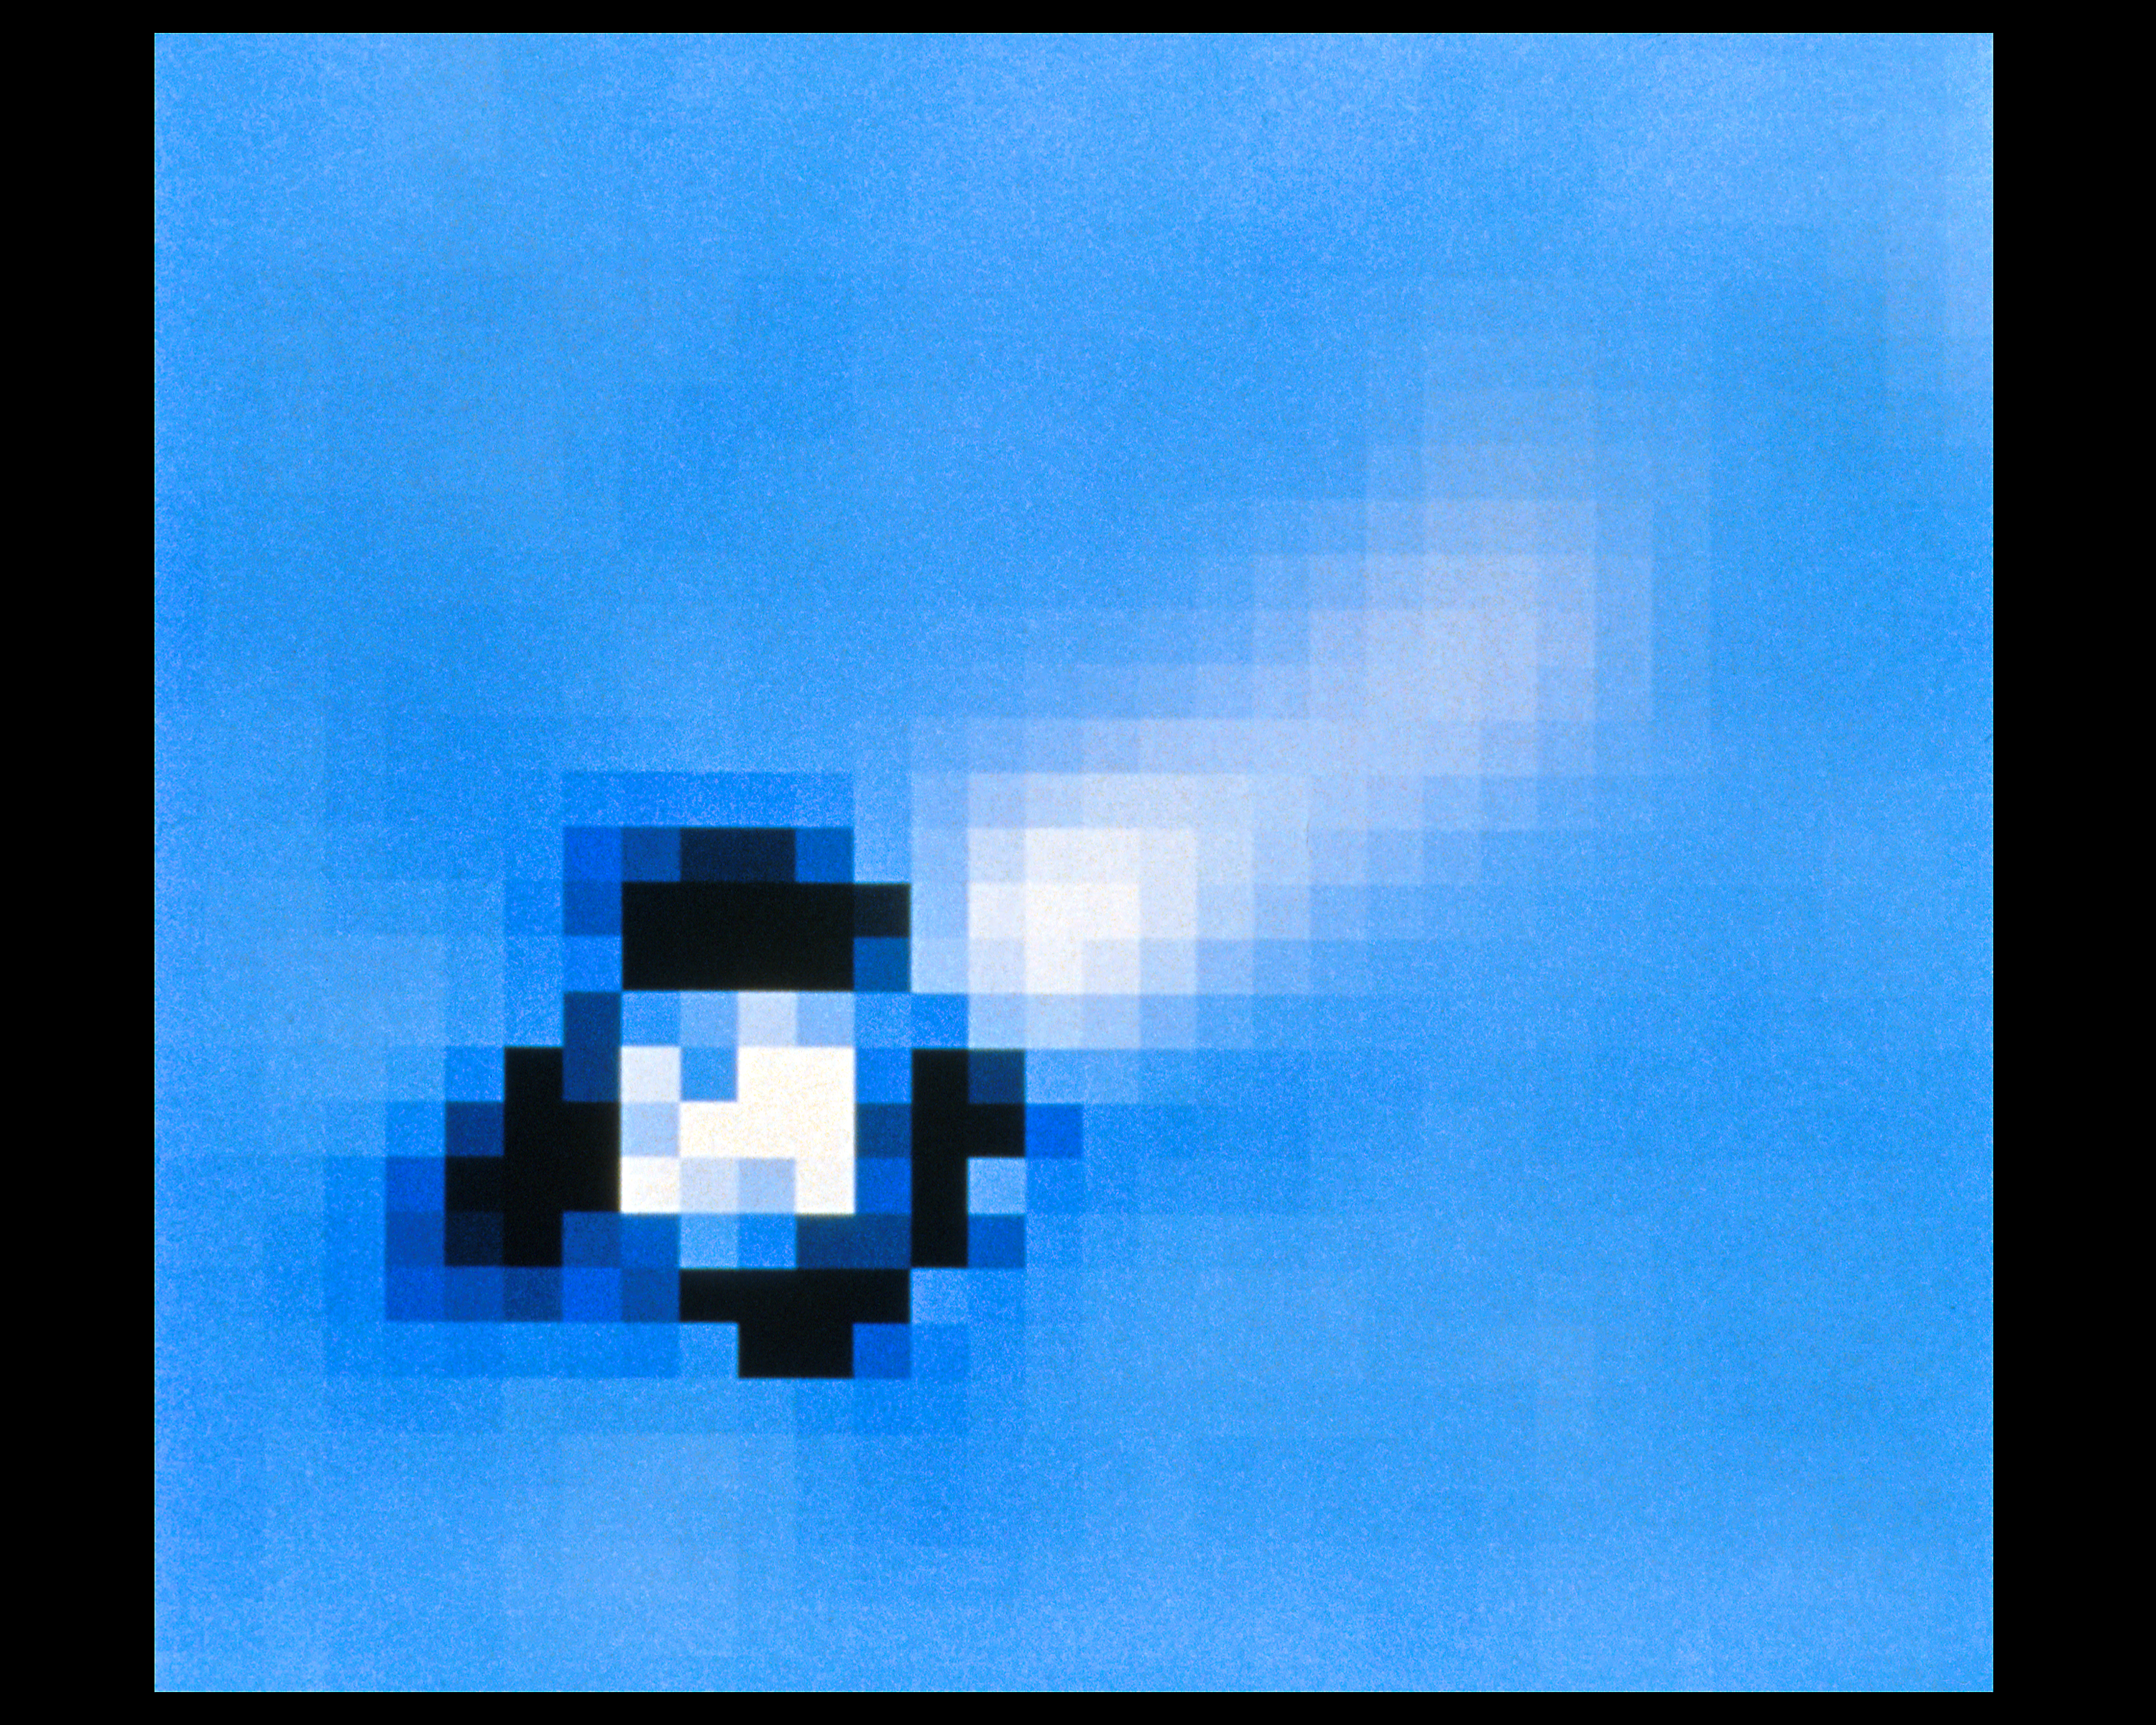

Radio galaxy PKS 0521-36 - ground-based view

In this ground-based image taken with the European Southern Observatory 3.6-meter telescope, the whole optical jet is embedded within the galaxy. To see the jet, star light from the galaxy is subtracted by computer processing.

Credit: NASA & ESA